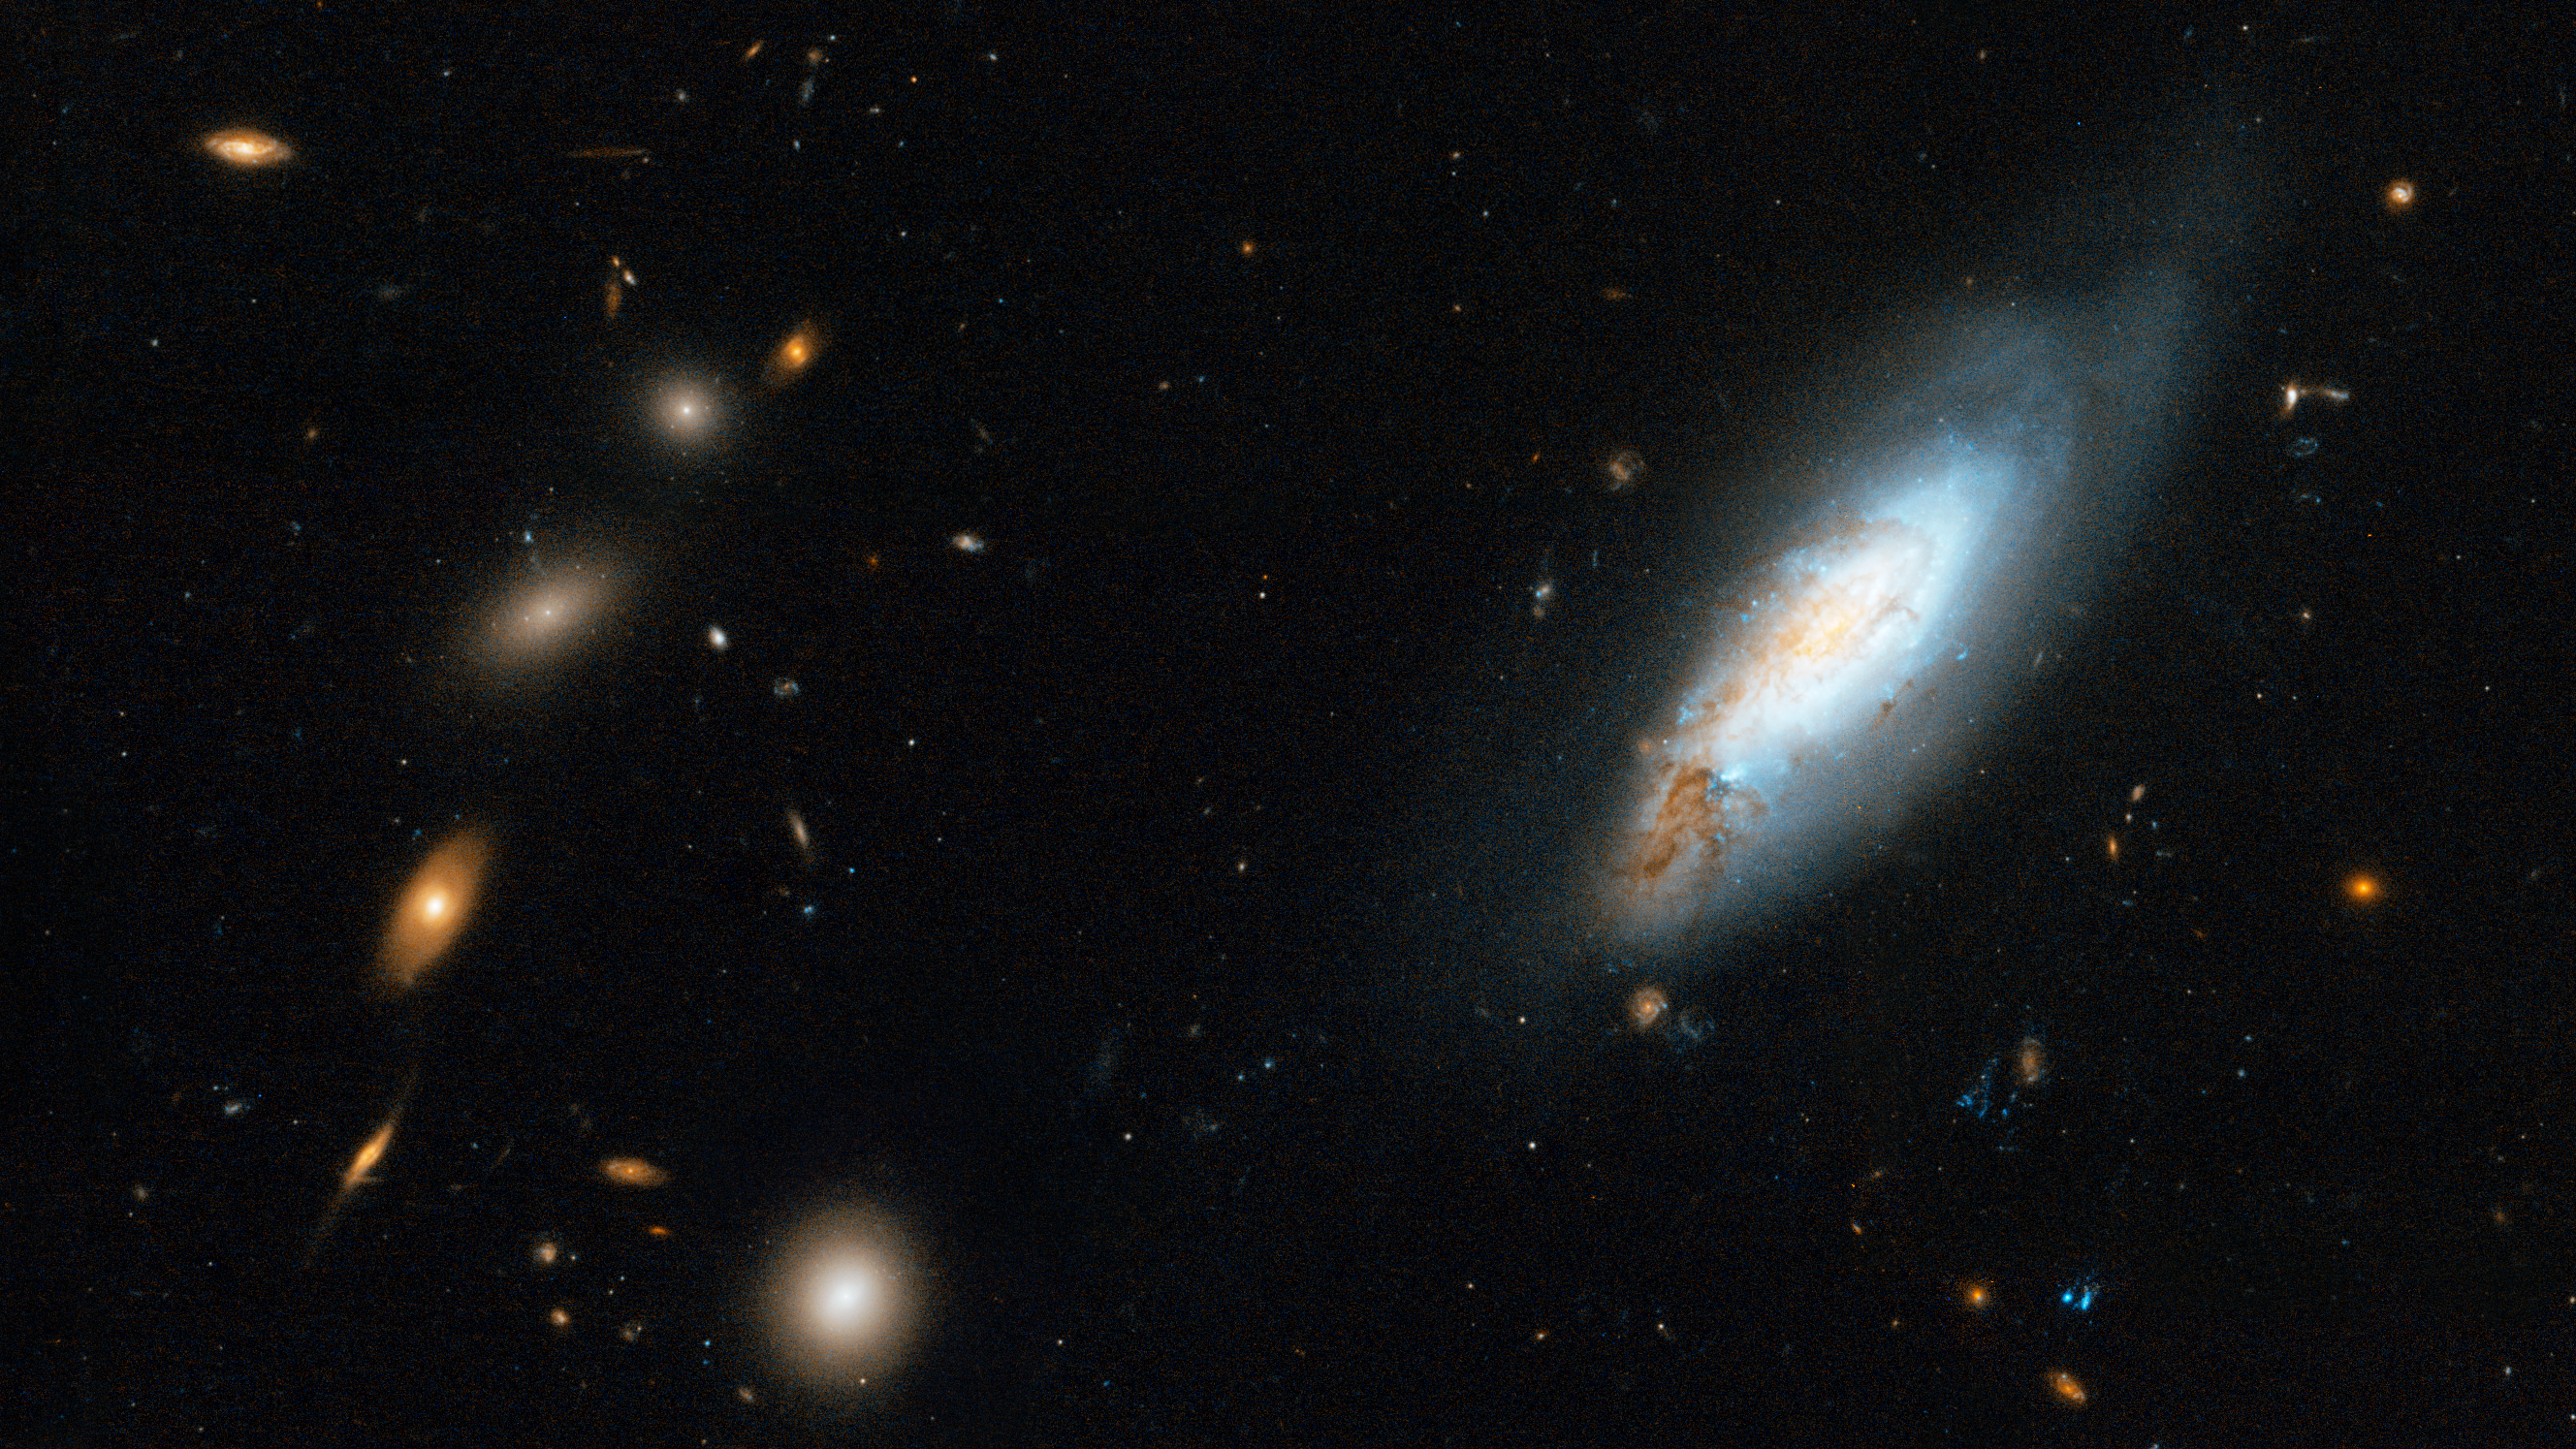

Coma Galaxy Cluster (Detail 1)

On the right, a spiral galaxy in the Coma Cluster.

Credit: NASA, ESA, and the Hubble Heritage Team (STScI/AURA). Acknowledgment: D. Carter (Liverpool John Moores University) and the Coma HST ACS Treasury Team.